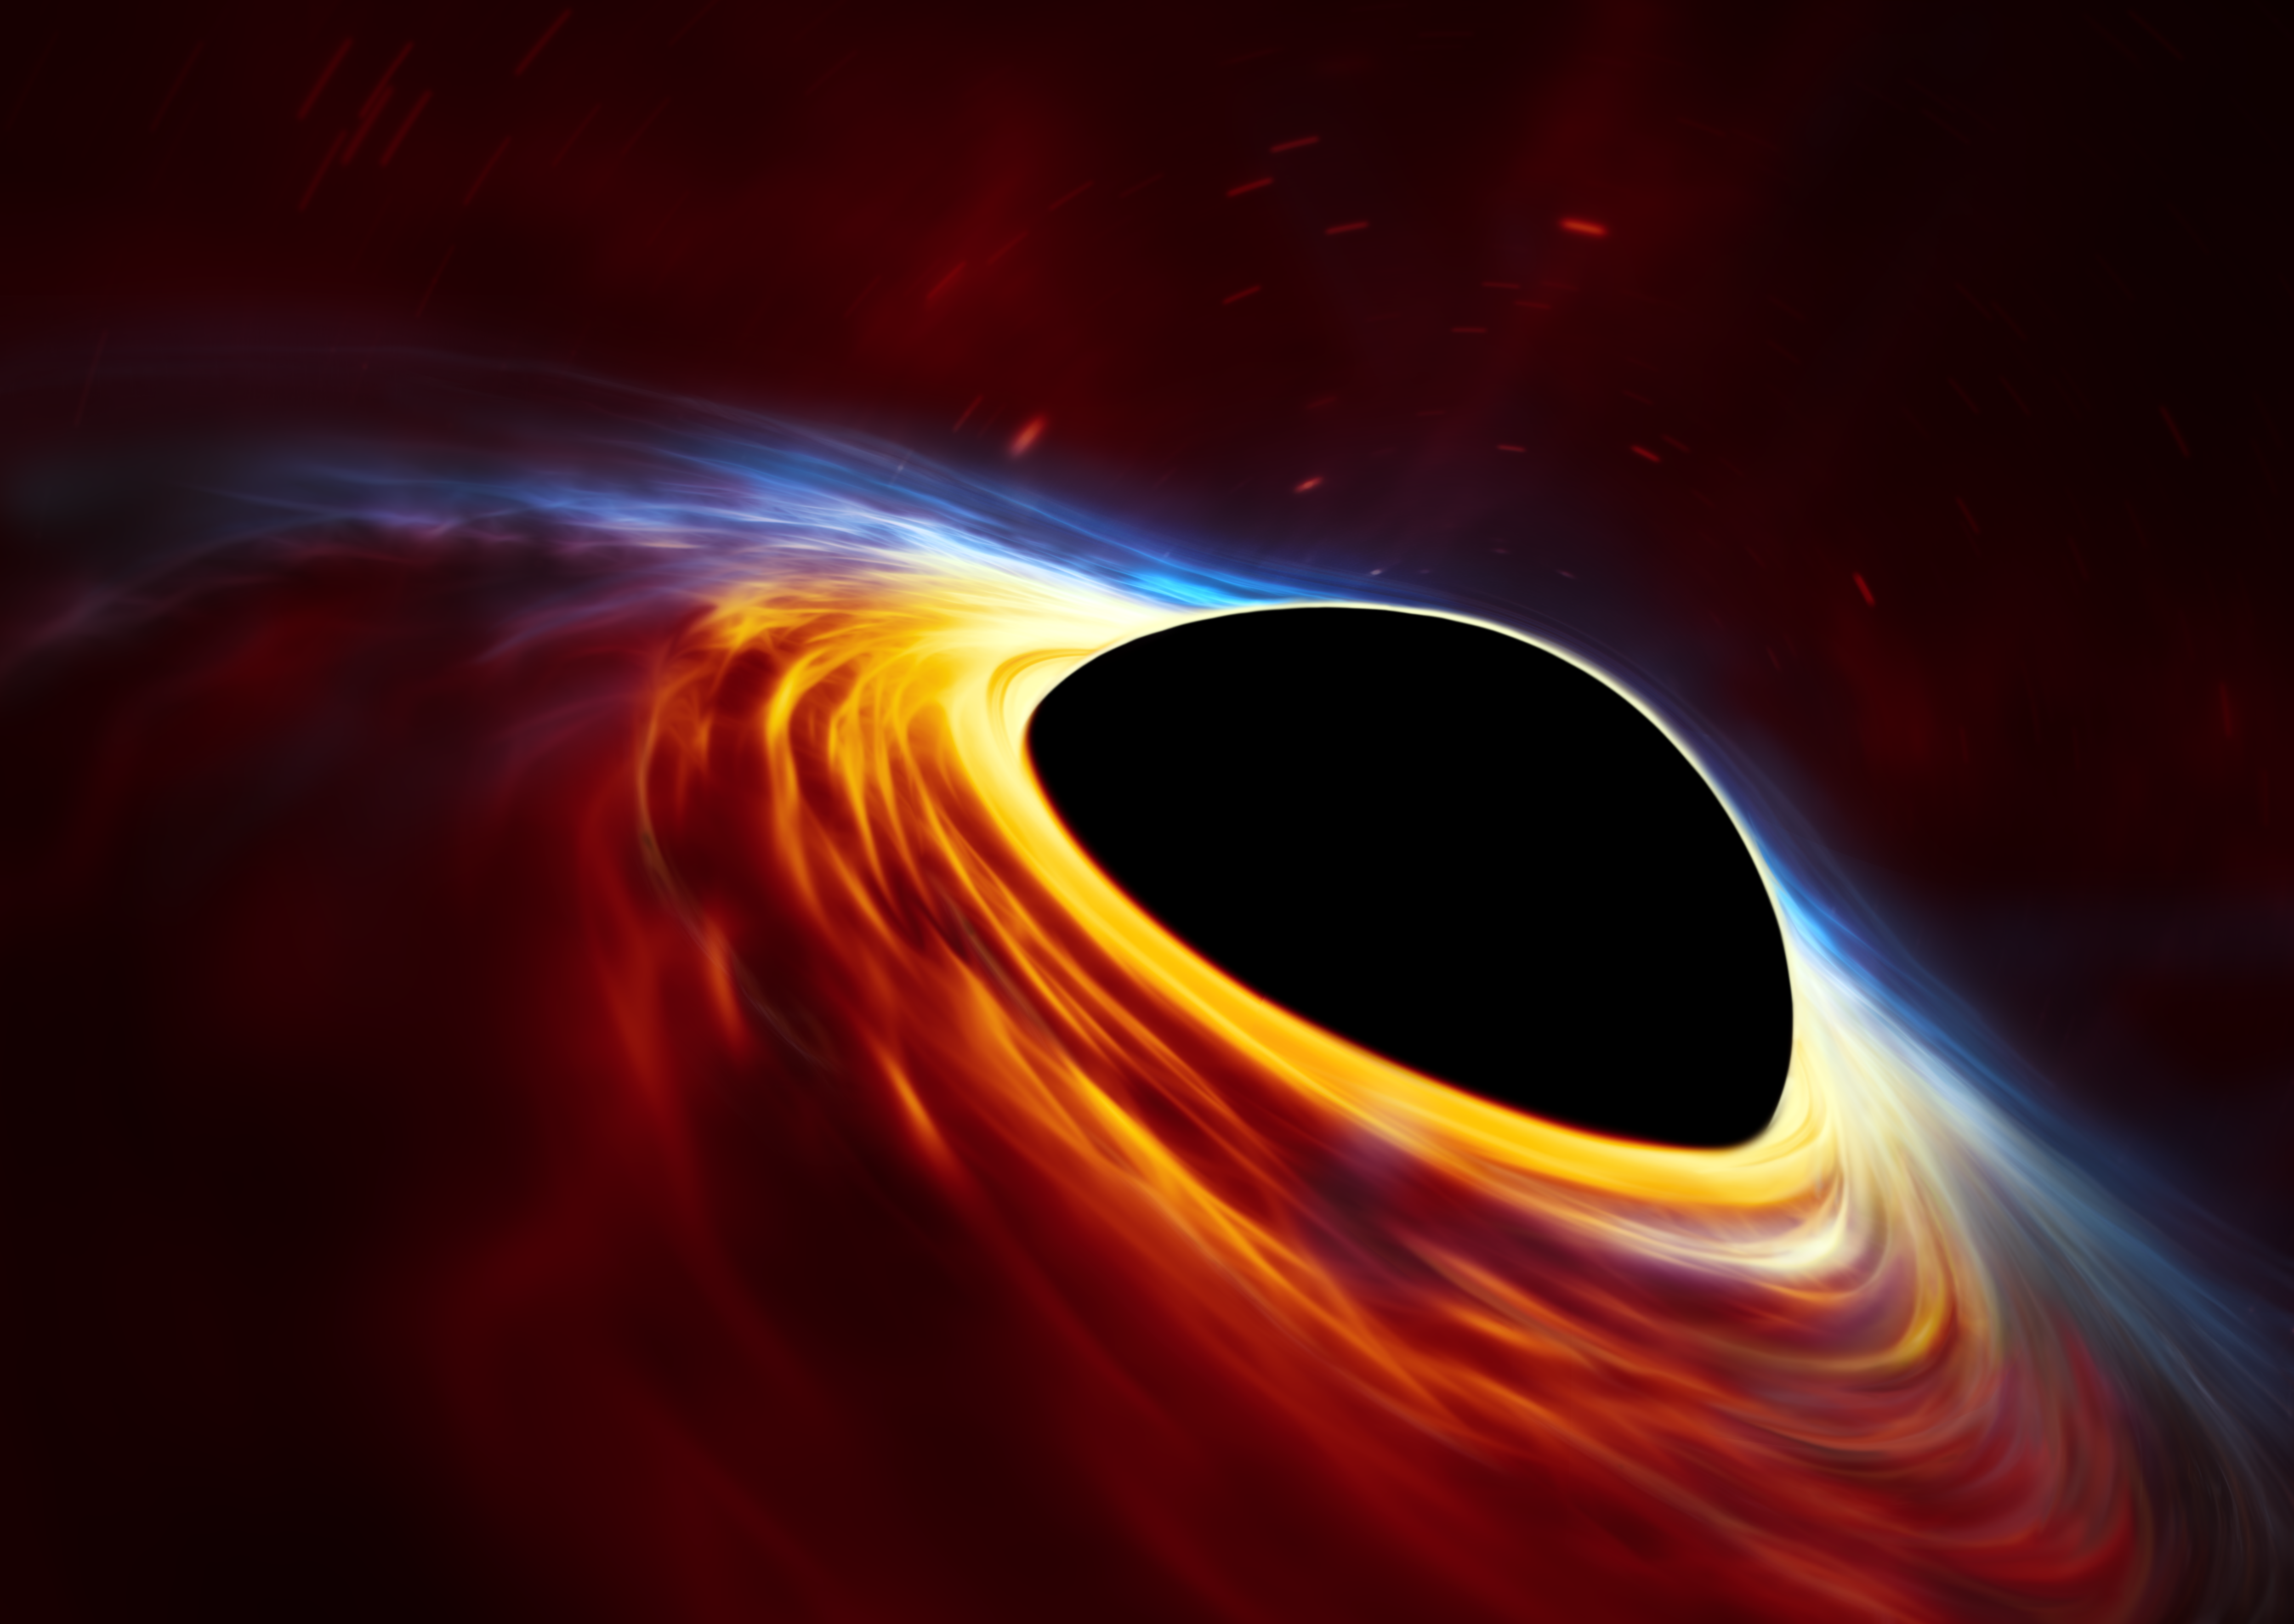

Supermassive black hole with torn-apart star (artist’s impression)

This artist’s impression depicts a rapidly spinning supermassive black hole surrounded by an accretion disc. This thin disc of rotating material consists of the leftovers of a Sun-like star which was ripped apart by the tidal forces of the black hole. Shocks in the colliding debris as well as heat generated in accretion led to a burst of light, resembling a supernova explosion.

Credit: ESA/Hubble, ESO, M. Kornmesser